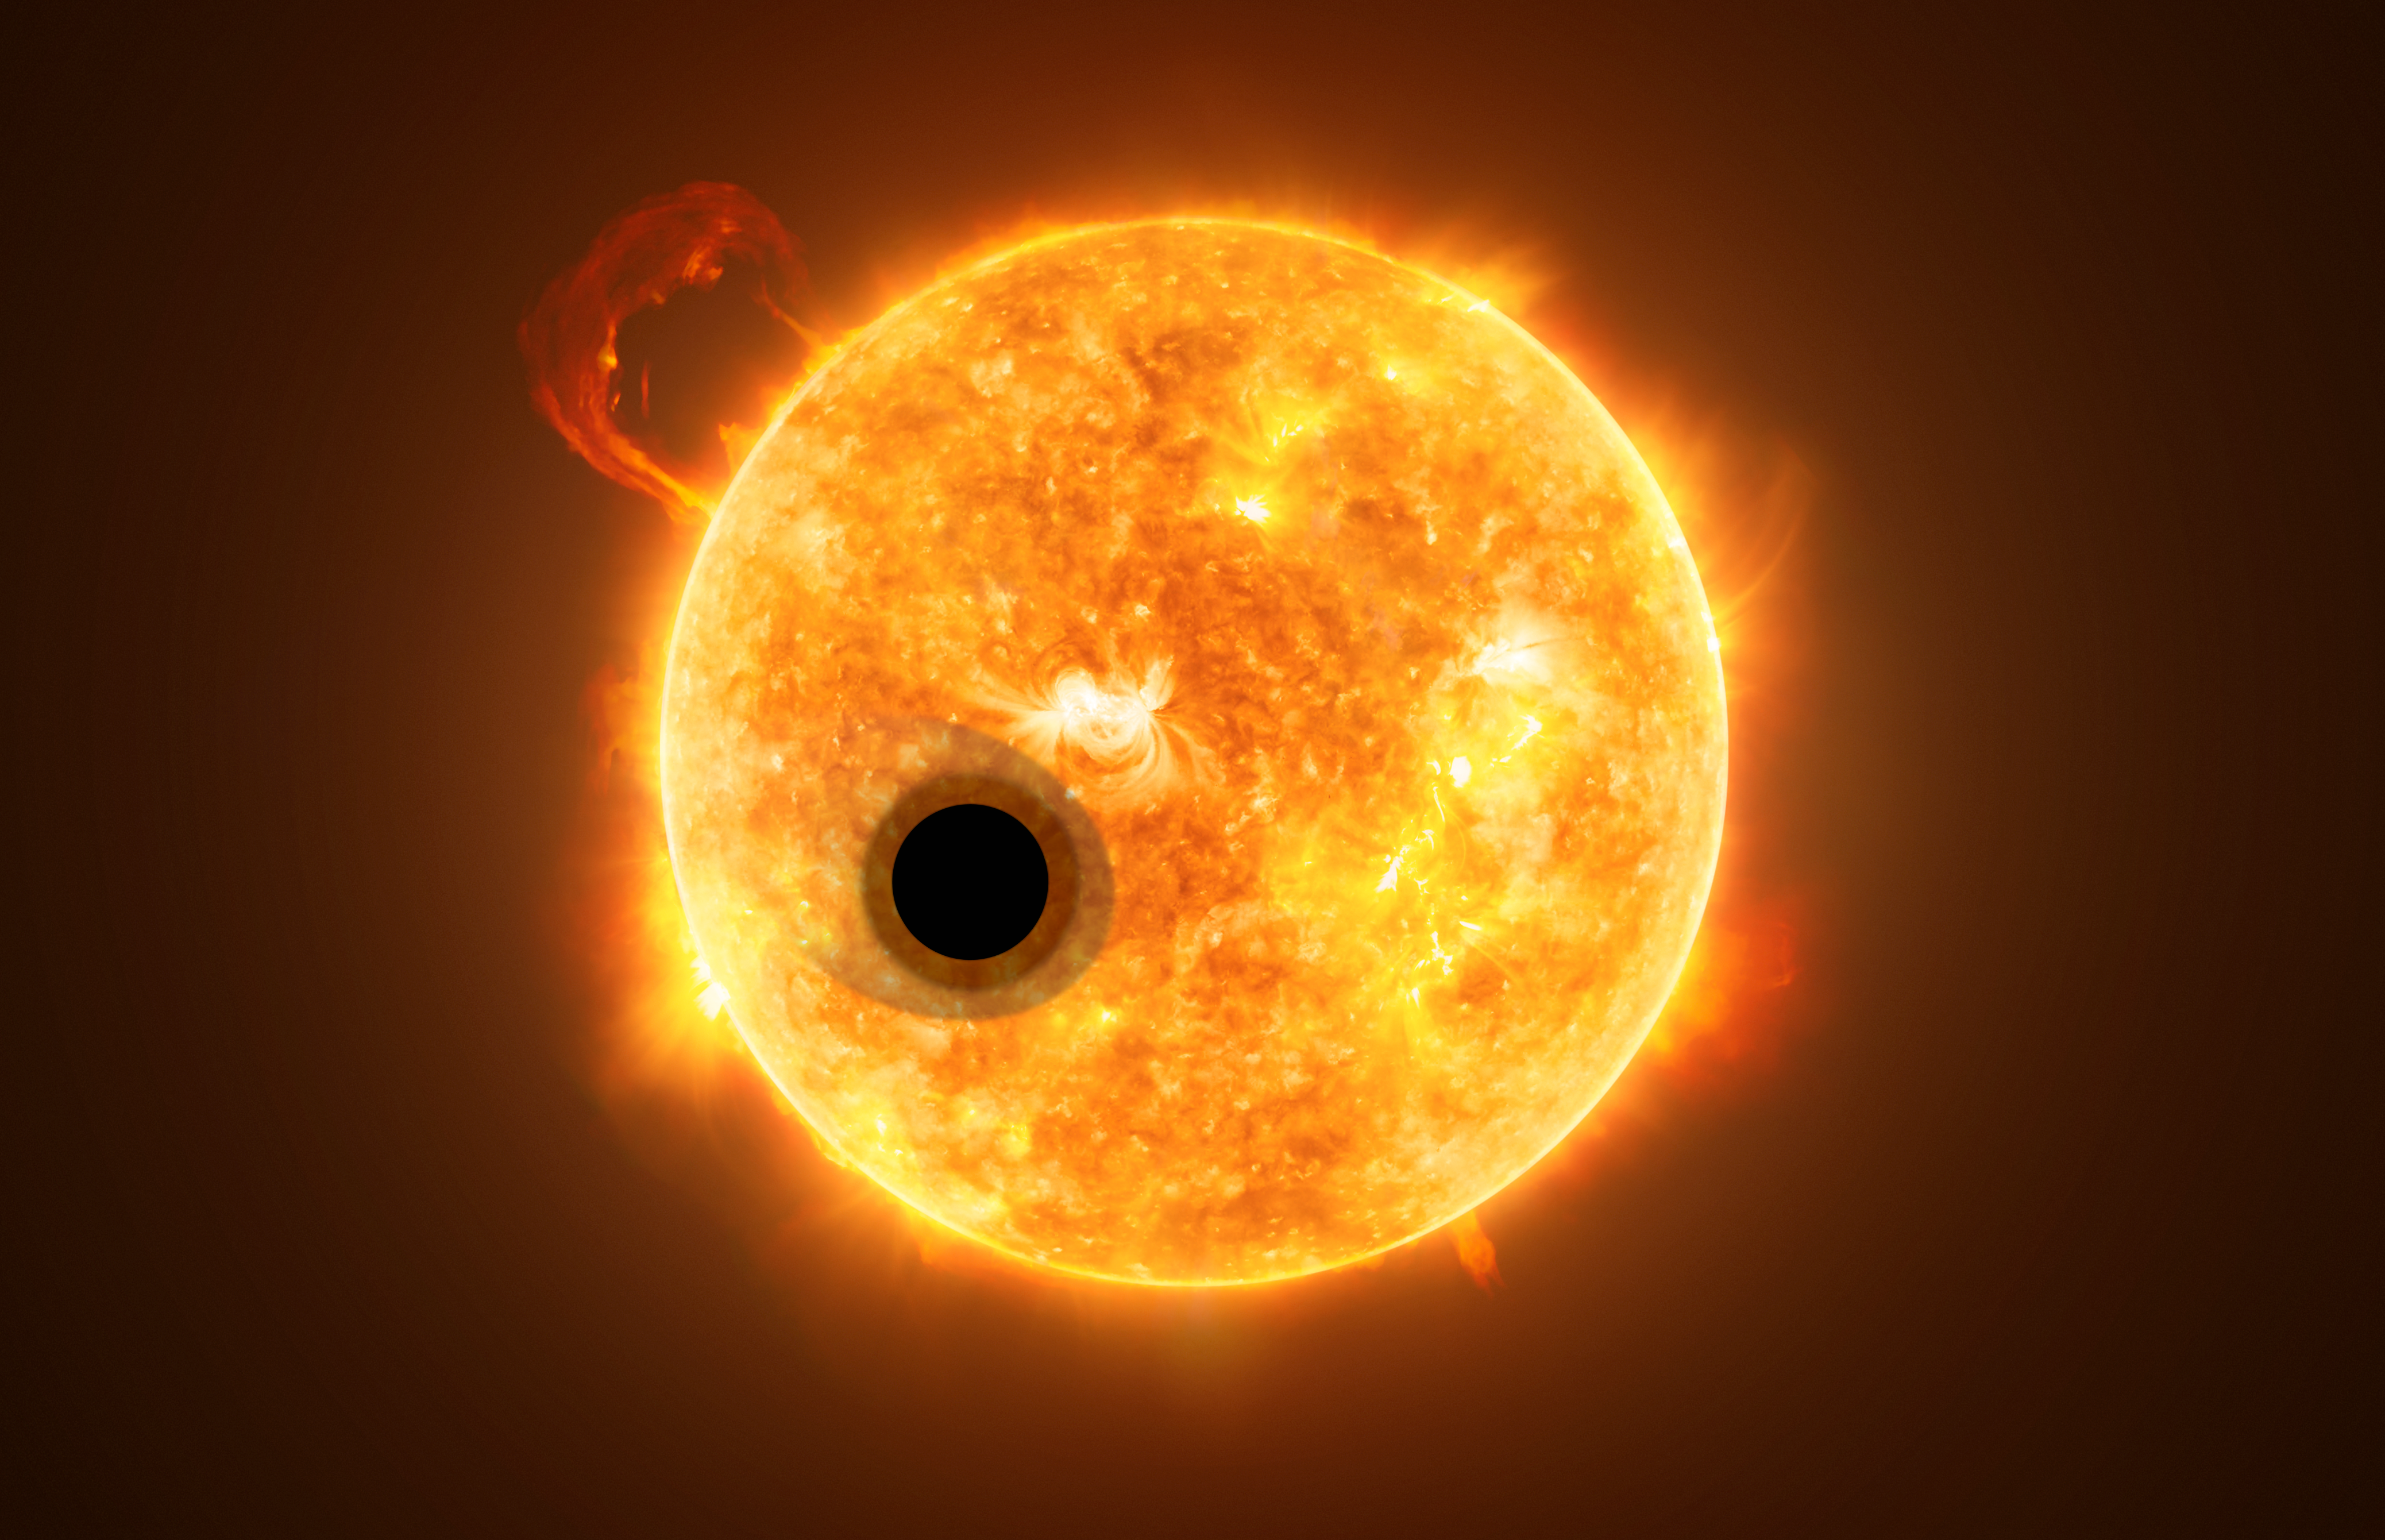

Artist’s impression of WASP-107b

The exoplanet WASP-107b is a gas giant, orbiting a highly active K-type main sequence star. The star is about 200 light-years from Earth. Using spectroscopy, scientists were able to find helium in the escaping atmosphere of the planet — the first detection of this element in the atmosphere of an exoplanet.

Credit: ESA/Hubble, NASA, M. Kornmesser